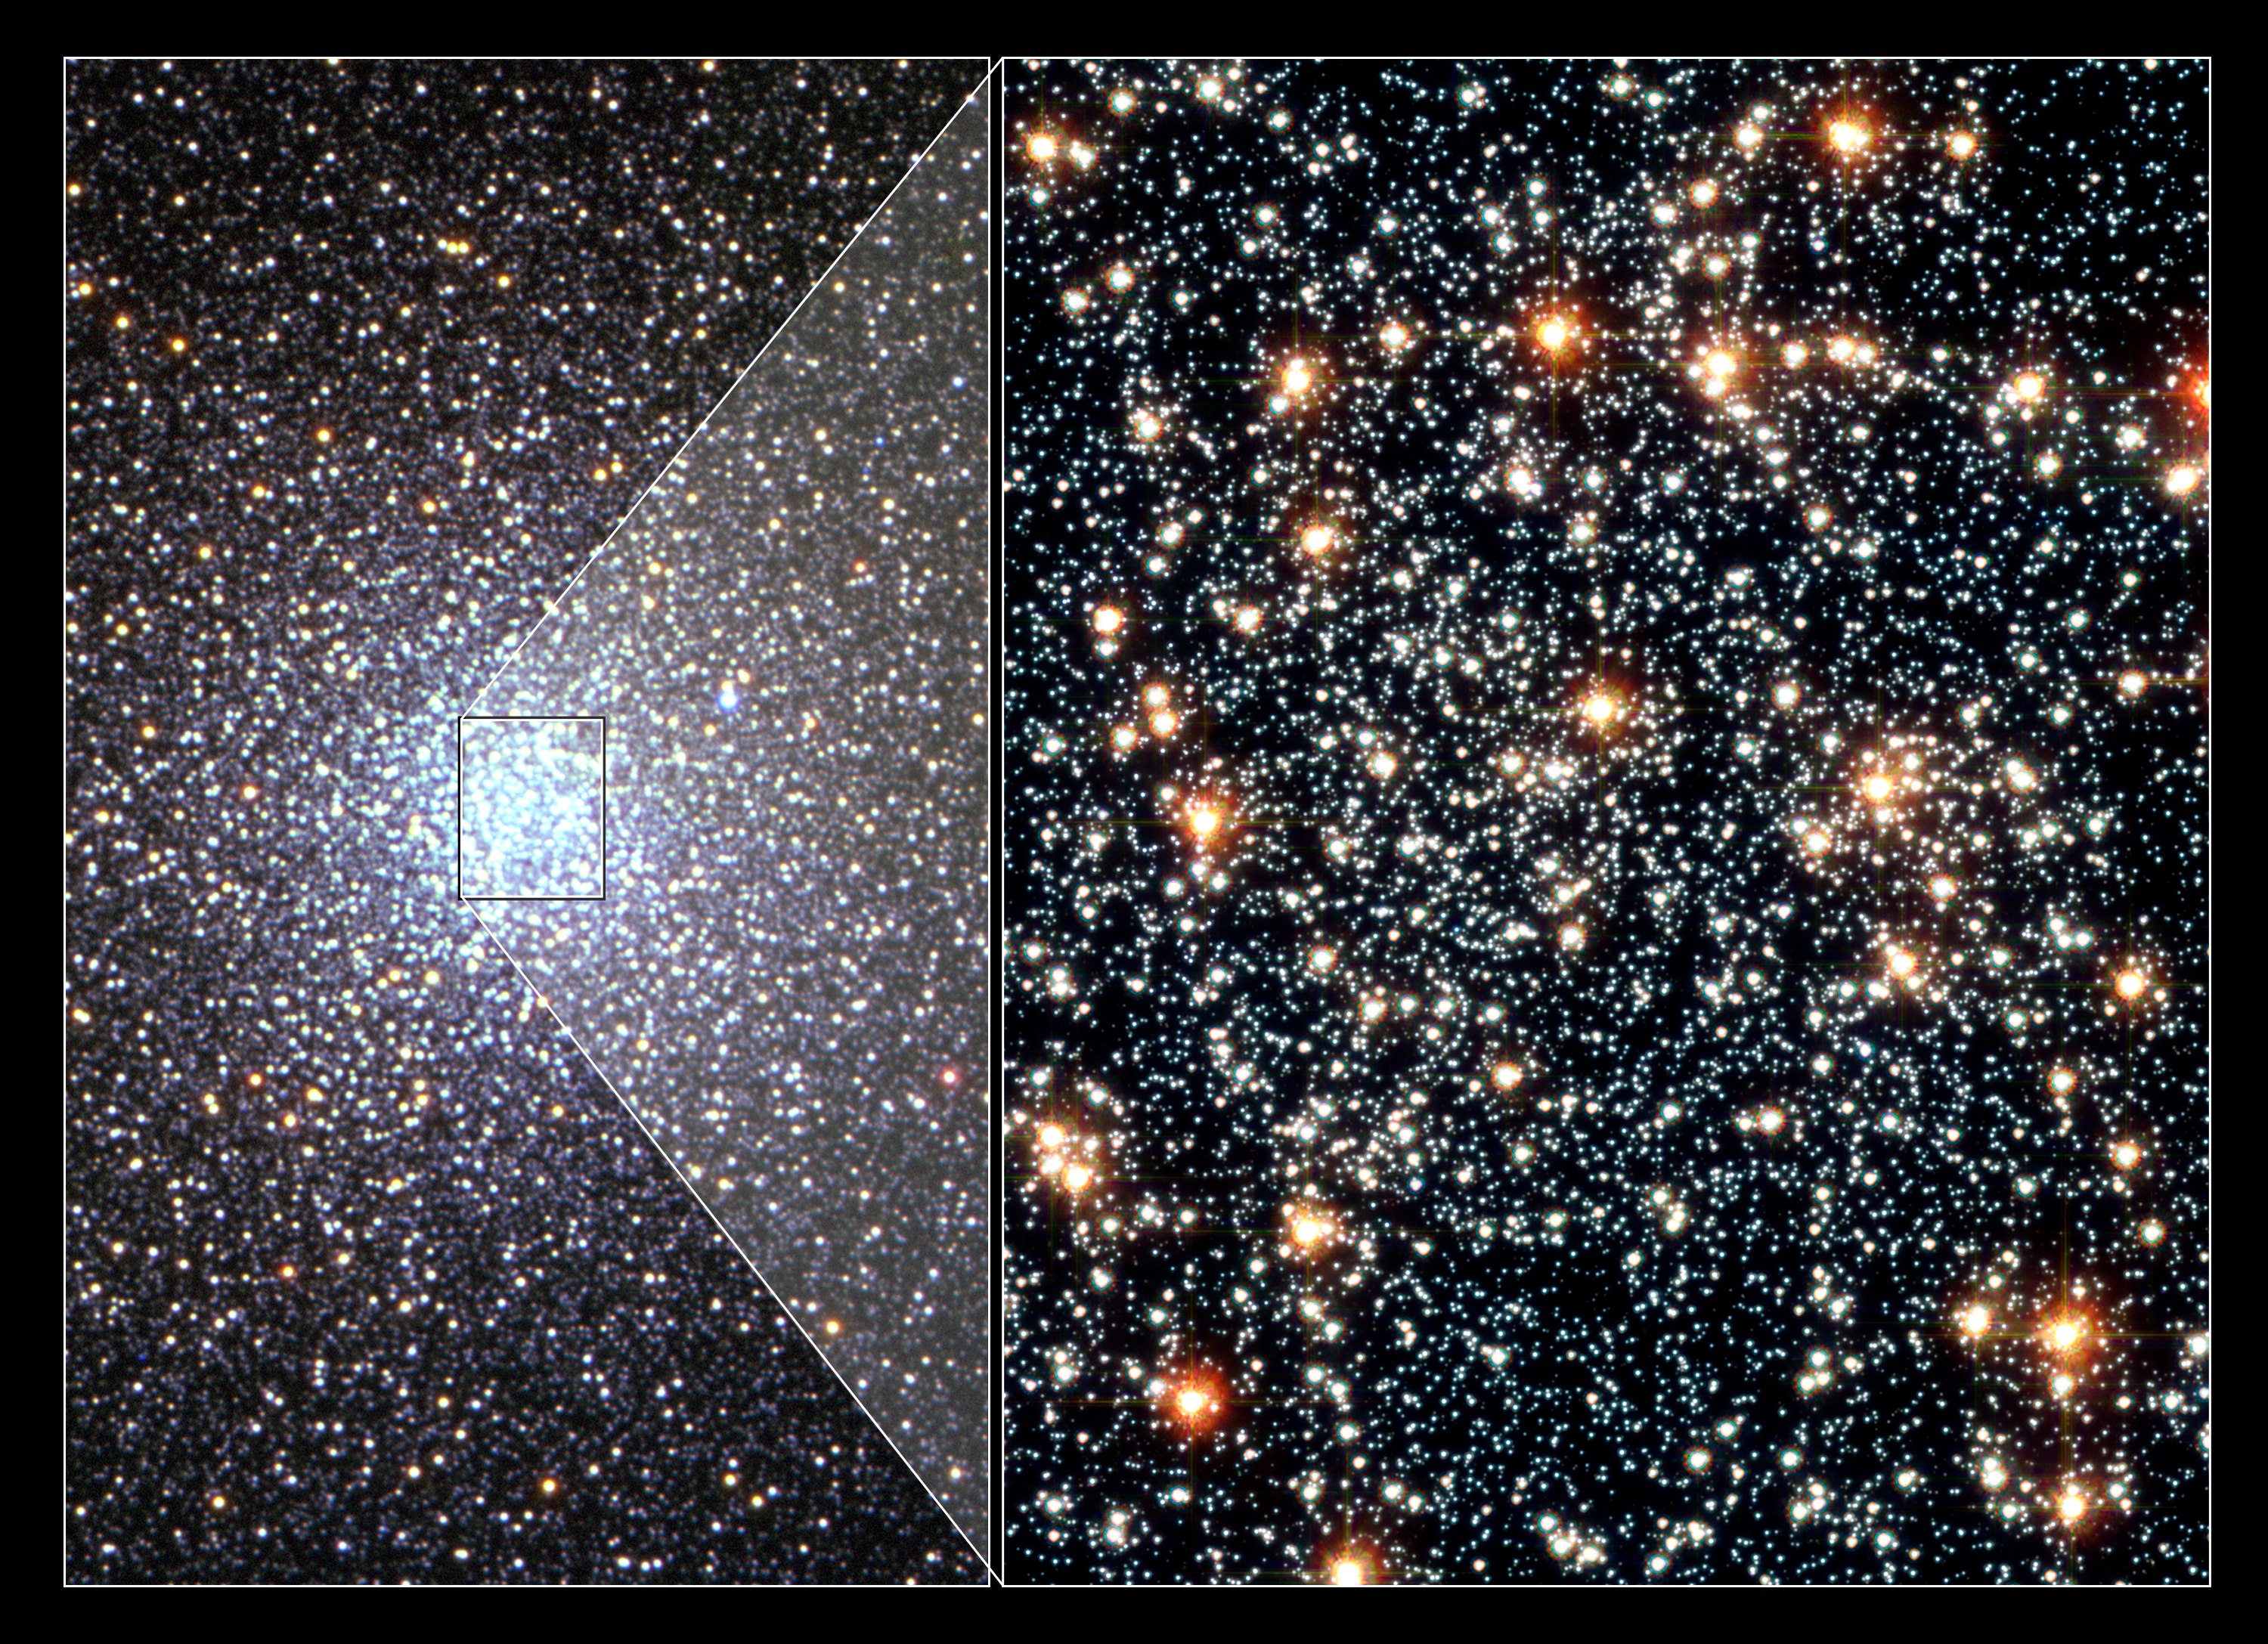

Stellar sorting in globular cluster 47 Tucanae

A seven year study with the NASA/ESA Hubble Space Telescope has provided astronomers with the best observational evidence yet that globular clusters sort out stars according to their mass, governed by a gravitational billiard ball game between stars. Heavier stars slow down and sink to the cluster's core, while lighter stars pick up speed and move across the cluster to its periphery. This process, called "mass segregation", has long been suspected for globular star clusters, but has never before been directly seen in action.

[Left] - A photo of the globular star cluster 47 Tucanae taken with the Very Large Telescope, in Chile. It is one of the densest globular clusters in the Southern hemisphere. The cluster contains one million stars.

[Right] - An NASA/ESA Hubble Space Telescope colour photo of the core of 47 Tucanae. Multiple photos of this region allowed astronomers to track the "beehive swarm" motion of stars. Precise velocities were obtained for nearly 15,000 stars in this cluster. This image was taken with Hubble's Advanced Camera for Surveys.

The international team was made of the following scientists: D.E. McLaughlin (University of Leicester, UK), J. Anderson (Rice University, USA), G. Meylan (?cole Polytechnique Federale de Lausanne, Switzerland), K. Gebhardt (University of Texas at Austin, USA), C. Pryor (Rutgers University, USA), D. Minniti (Pontifica Universidad Catolica, Chile), and S. Phinney (Caltech, USA).

Credit: [Left]: Very Large Telescope/European Southern Observatory, R. Kotak and H. Boffin (ESO). [Right]: NASA, ESA, and G. Meylan (?cole Polytechnique Federale de Lausanne)